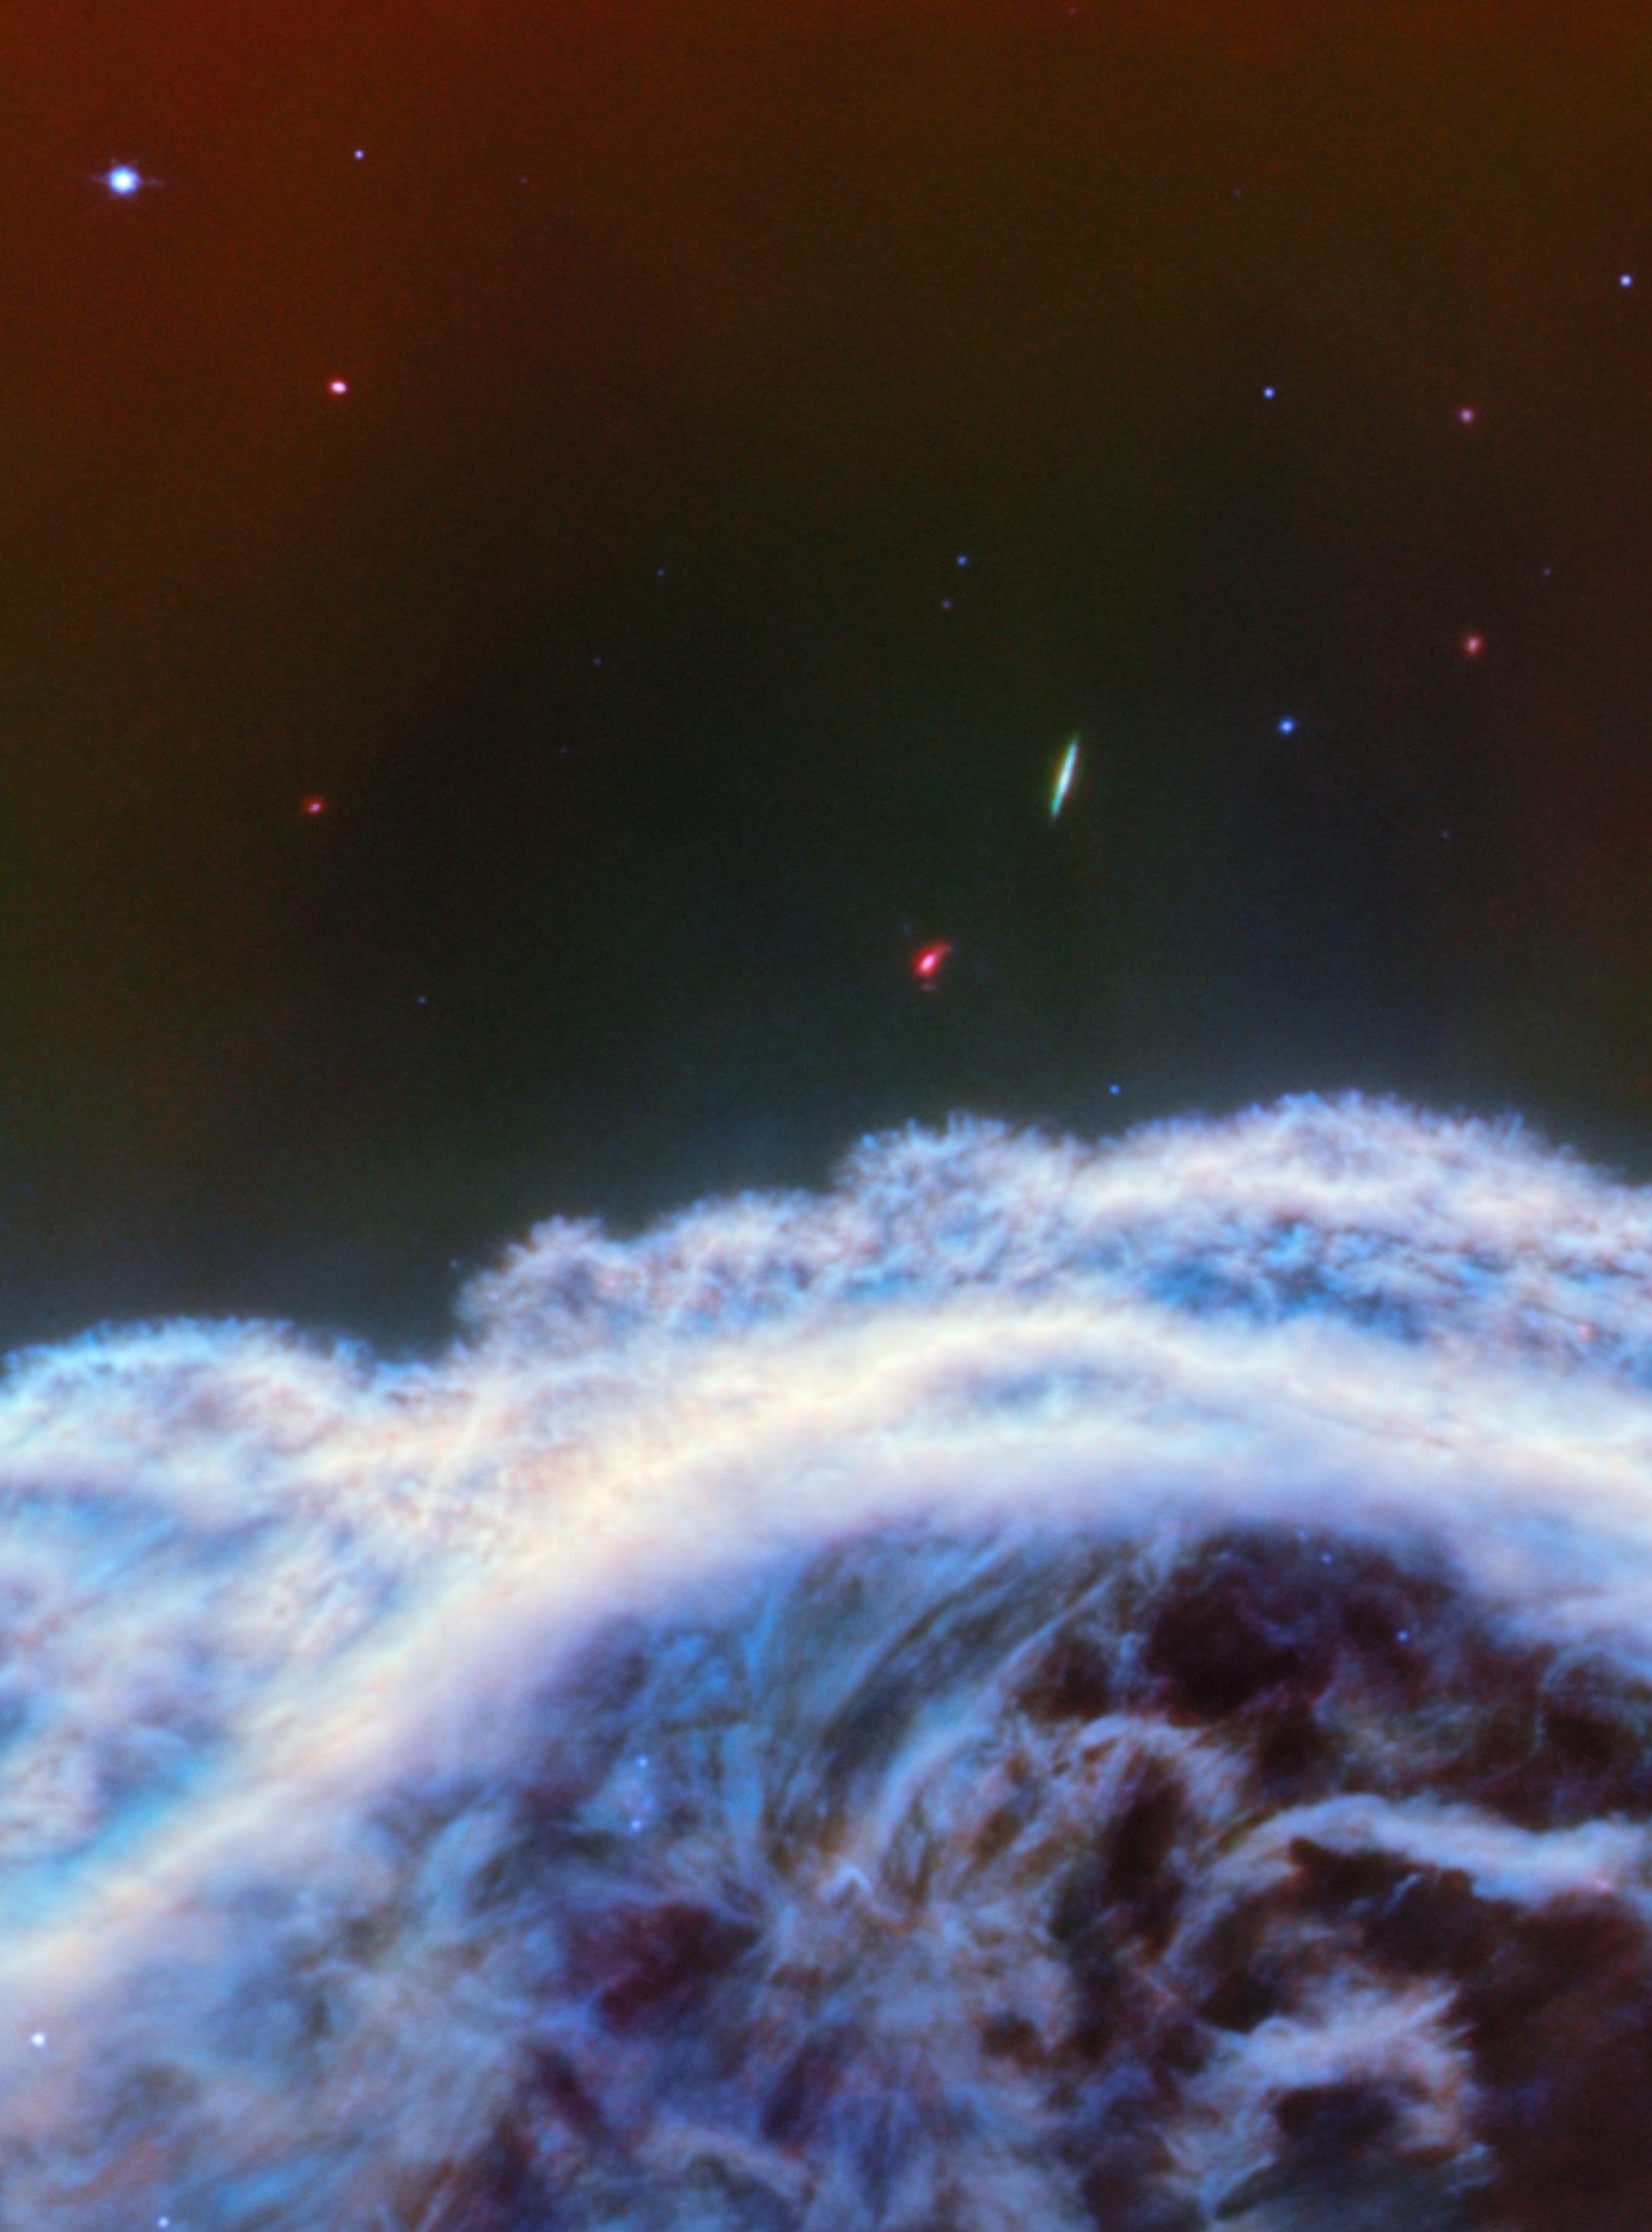

Horsehead Nebula (MIRI image)

The NASA/ESA/CSA James Webb Space Telescope has captured the sharpest infrared images to date of one of the most distinctive objects in our skies, the Horsehead Nebula. These observations show a part of the iconic nebula in a whole new light, capturing its complexity with unprecedented spatial resolution.

Webb’s new images show part of the sky in the constellation Orion (The Hunter), in the western side of the Orion B molecular cloud. Rising from turbulent waves of dust and gas is the Horsehead Nebula, otherwise known as Barnard 33, which resides roughly 1300 light-years away.

The nebula formed from a collapsing interstellar cloud of material, and glows because it is illuminated by a nearby hot star. The gas clouds surrounding the Horsehead have already dissipated, but the jutting pillar is made of thick clumps of material that is harder to erode. Astronomers estimate that the Horsehead has about five million years left before it too disintegrates. Webb’s new view focuses on the illuminated edge of the top of the nebula’s distinctive dust and gas structure.

The Horsehead Nebula is a well-known photon-dominated region, or PDR. In such a region ultraviolet light from young, massive stars creates a mostly neutral, warm area of gas and dust between the fully ionised gas surrounding the massive stars and the clouds in which they are born. This ultraviolet radiation strongly influences the gas chemistry of these regions and acts as the most important source of heat.

These regions occur where interstellar gas is dense enough to remain neutral, but not dense enough to prevent the penetration of far-ultraviolet light from massive stars. The light emitted from such PDRs provides a unique tool to study the physical and chemical processes that drive the evolution of interstellar matter in our galaxy, and throughout the Universe from the early era of vigorous star formation to the present day.

Owing to its proximity and its nearly edge-on geometry, the Horsehead Nebula is an ideal target for astronomers to study the physical structures of PDRs and the evolution of the chemical characteristics of the gas and dust within their respective environments, and the transition regions between them. It is considered one of the best objects in the sky to study how radiation interacts with interstellar matter.

This image was captured with Webb’s MIRI (Mid-InfraRed Instrument).

Credit: ESA/Webb, NASA, CSA, K. Misselt (University of Arizona) and A. Abergel (IAS/University Paris-Saclay, CNRS)